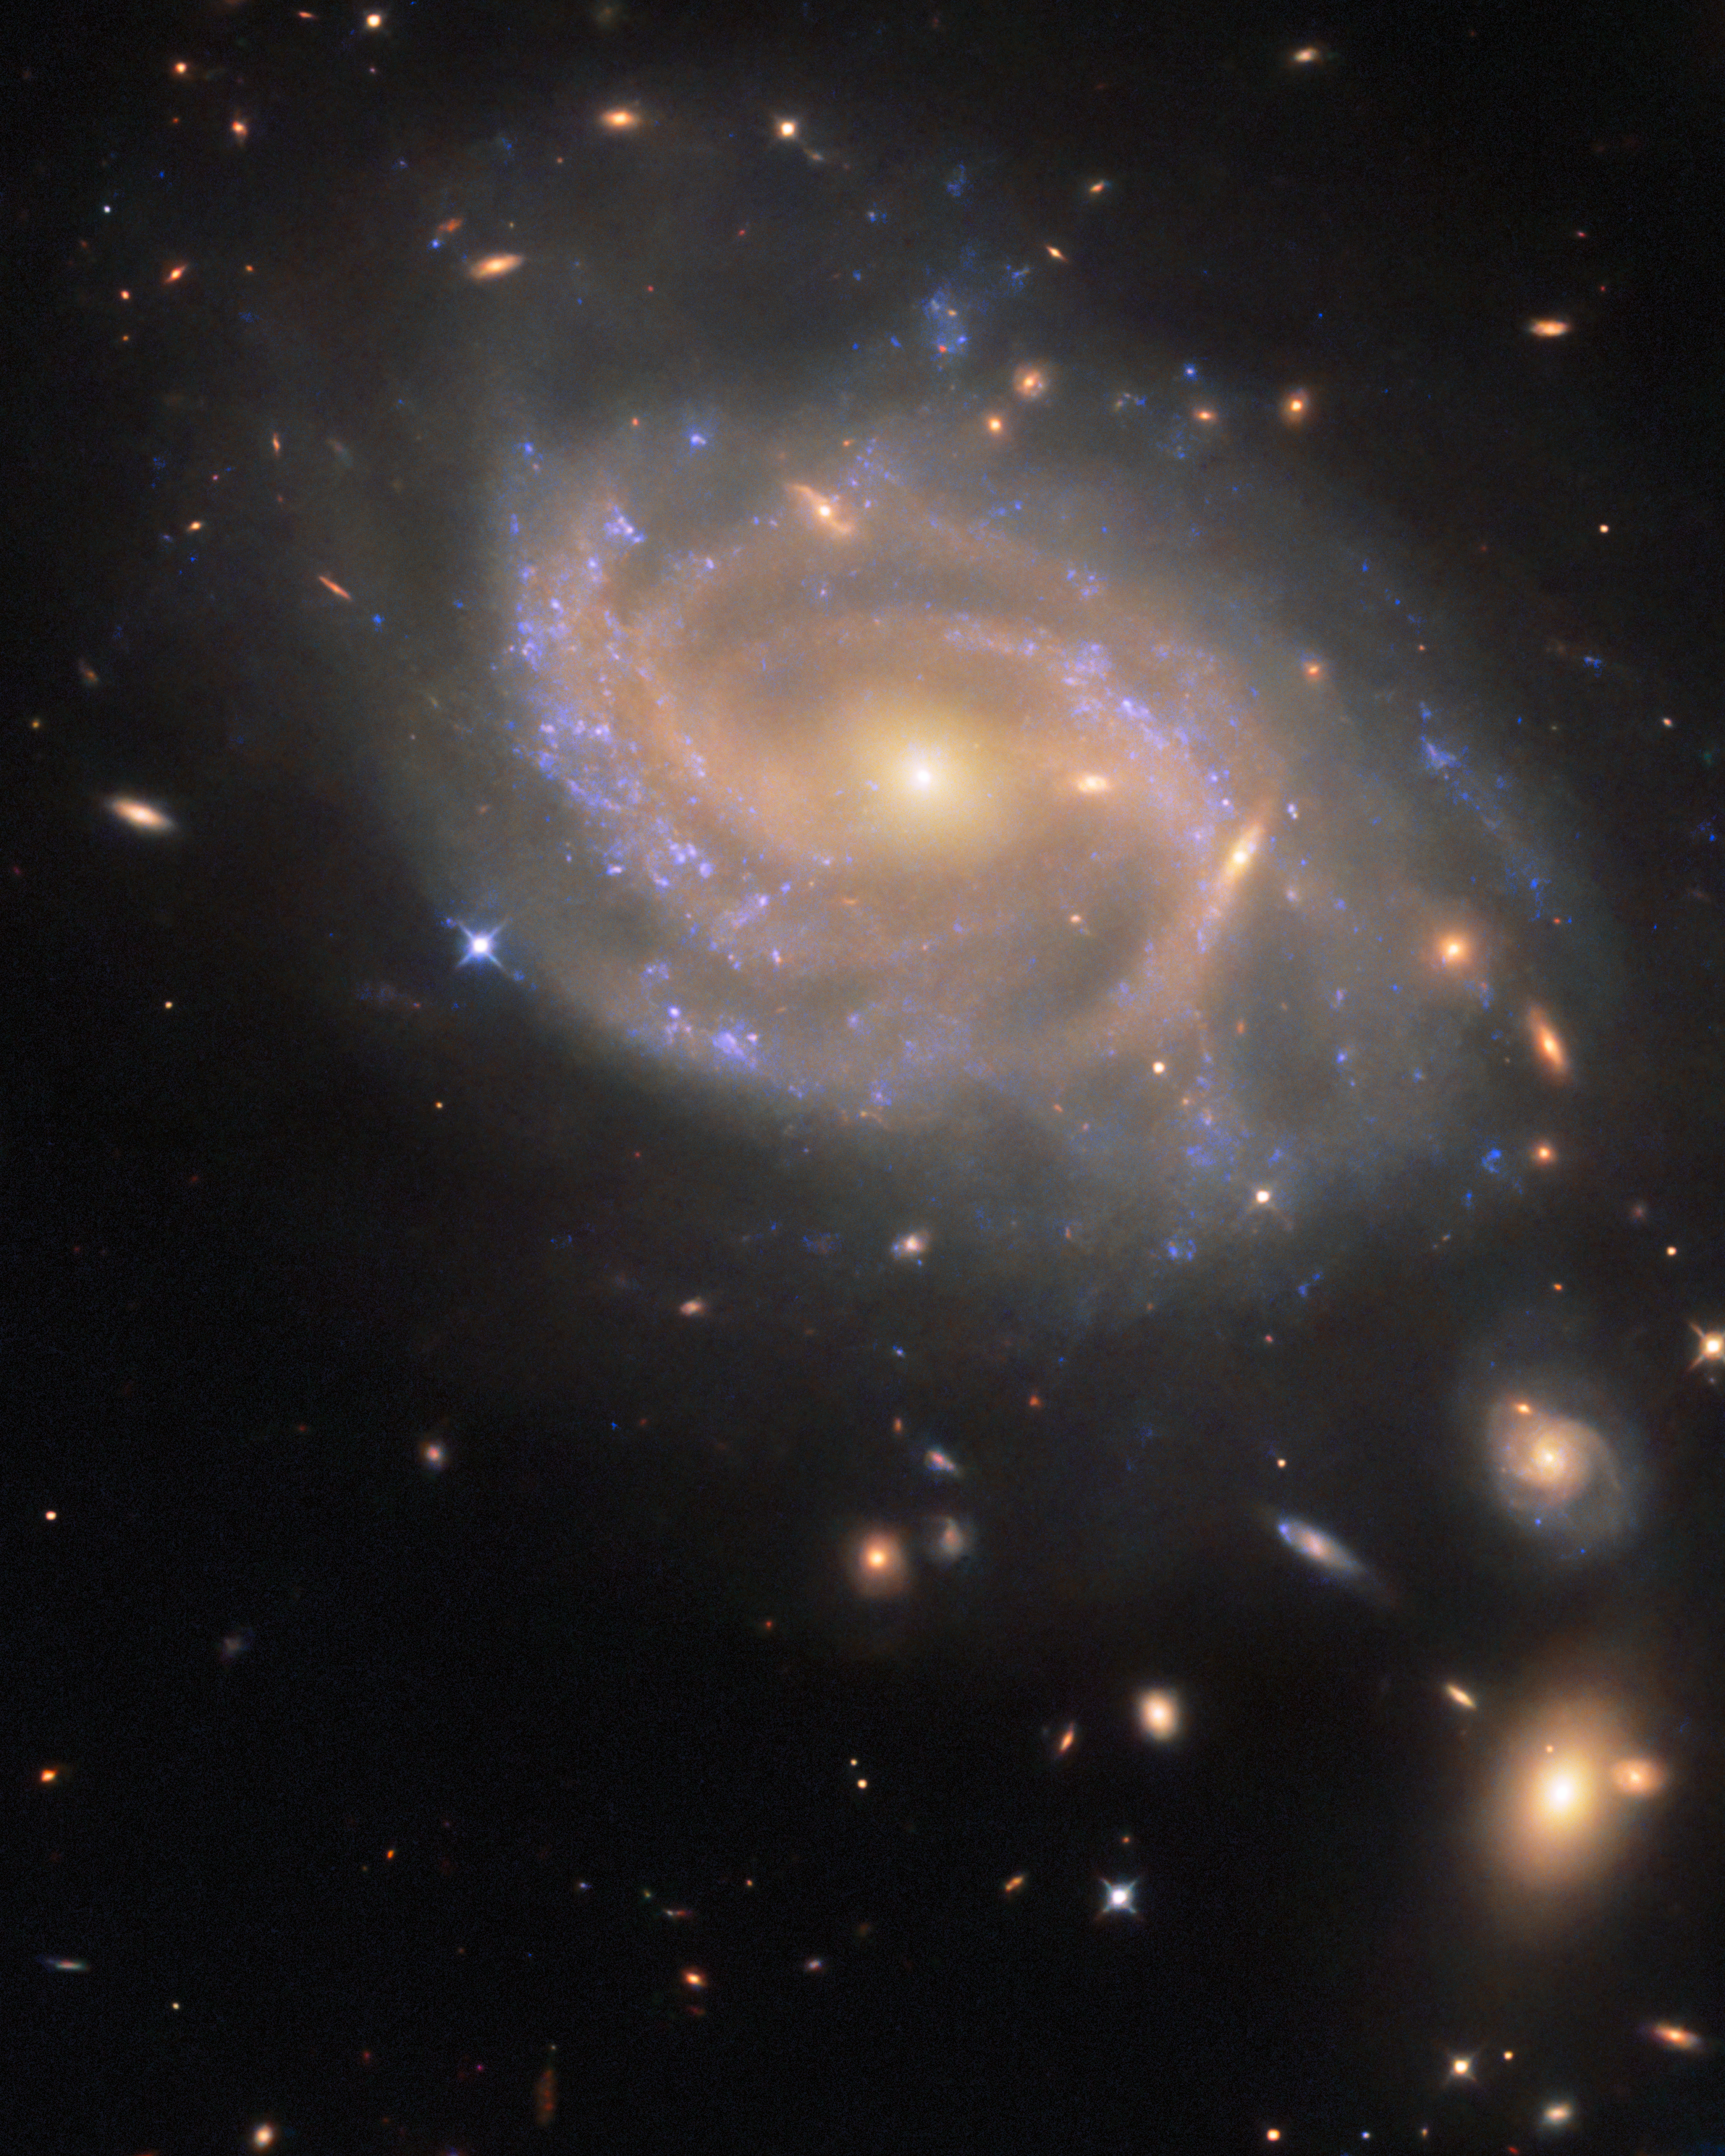

Swirling spiral in Hydra

The swirling spiral galaxy in this NASA/ESA Hubble Space Telescope Picture of the Week is NGC 3285B, which resides 137 million light-years away in the constellation Hydra (The Water Snake). Hydra has the largest area of the 88 constellations that cover the entire sky in a celestial patchwork. It’s also the longest constellation, stretching 100 degrees across the sky. It would take nearly 200 full Moons, placed side by side, to reach from one side of the constellation to the other.

NGC 3285B is a member of the Hydra I cluster, one of the largest galaxy clusters in the nearby Universe. Galaxy clusters are collections of hundreds to thousands of galaxies that are bound to one another by gravity. The Hydra I cluster is anchored by two giant elliptical galaxies at its centre. Each of these galaxies is about 150,000 light-years across, making them about 50% larger than our home galaxy, the Milky Way.

NGC 3285B sits on the outskirts of its home cluster, far from the massive galaxies at the centre. This galaxy drew Hubble’s attention because it hosted a Type Ia supernova in 2023. Type Ia supernovae happen when a type of condensed stellar core called a white dwarf detonates, igniting a sudden burst of nuclear fusion that briefly shines about 5 billion times brighter than the Sun. The supernova, named SN 2023xqm, is visible here as a blue-ish dot on the left edge of the galaxy’s disc.

Hubble observed NGC 3285B as part of an observing programme that targeted 100 Type Ia supernovae. By viewing each of these supernovae in ultraviolet, optical, and near-infrared light, researchers aim to disentangle the effects of distance and dust, both of which can make a supernova appear redder than it actually is. This programme will help refine cosmic distance measurements that rely on observations of Type Ia supernovae.

Credit: ESA/Hubble & NASA, R. J. Foley (UC Santa Cruz)